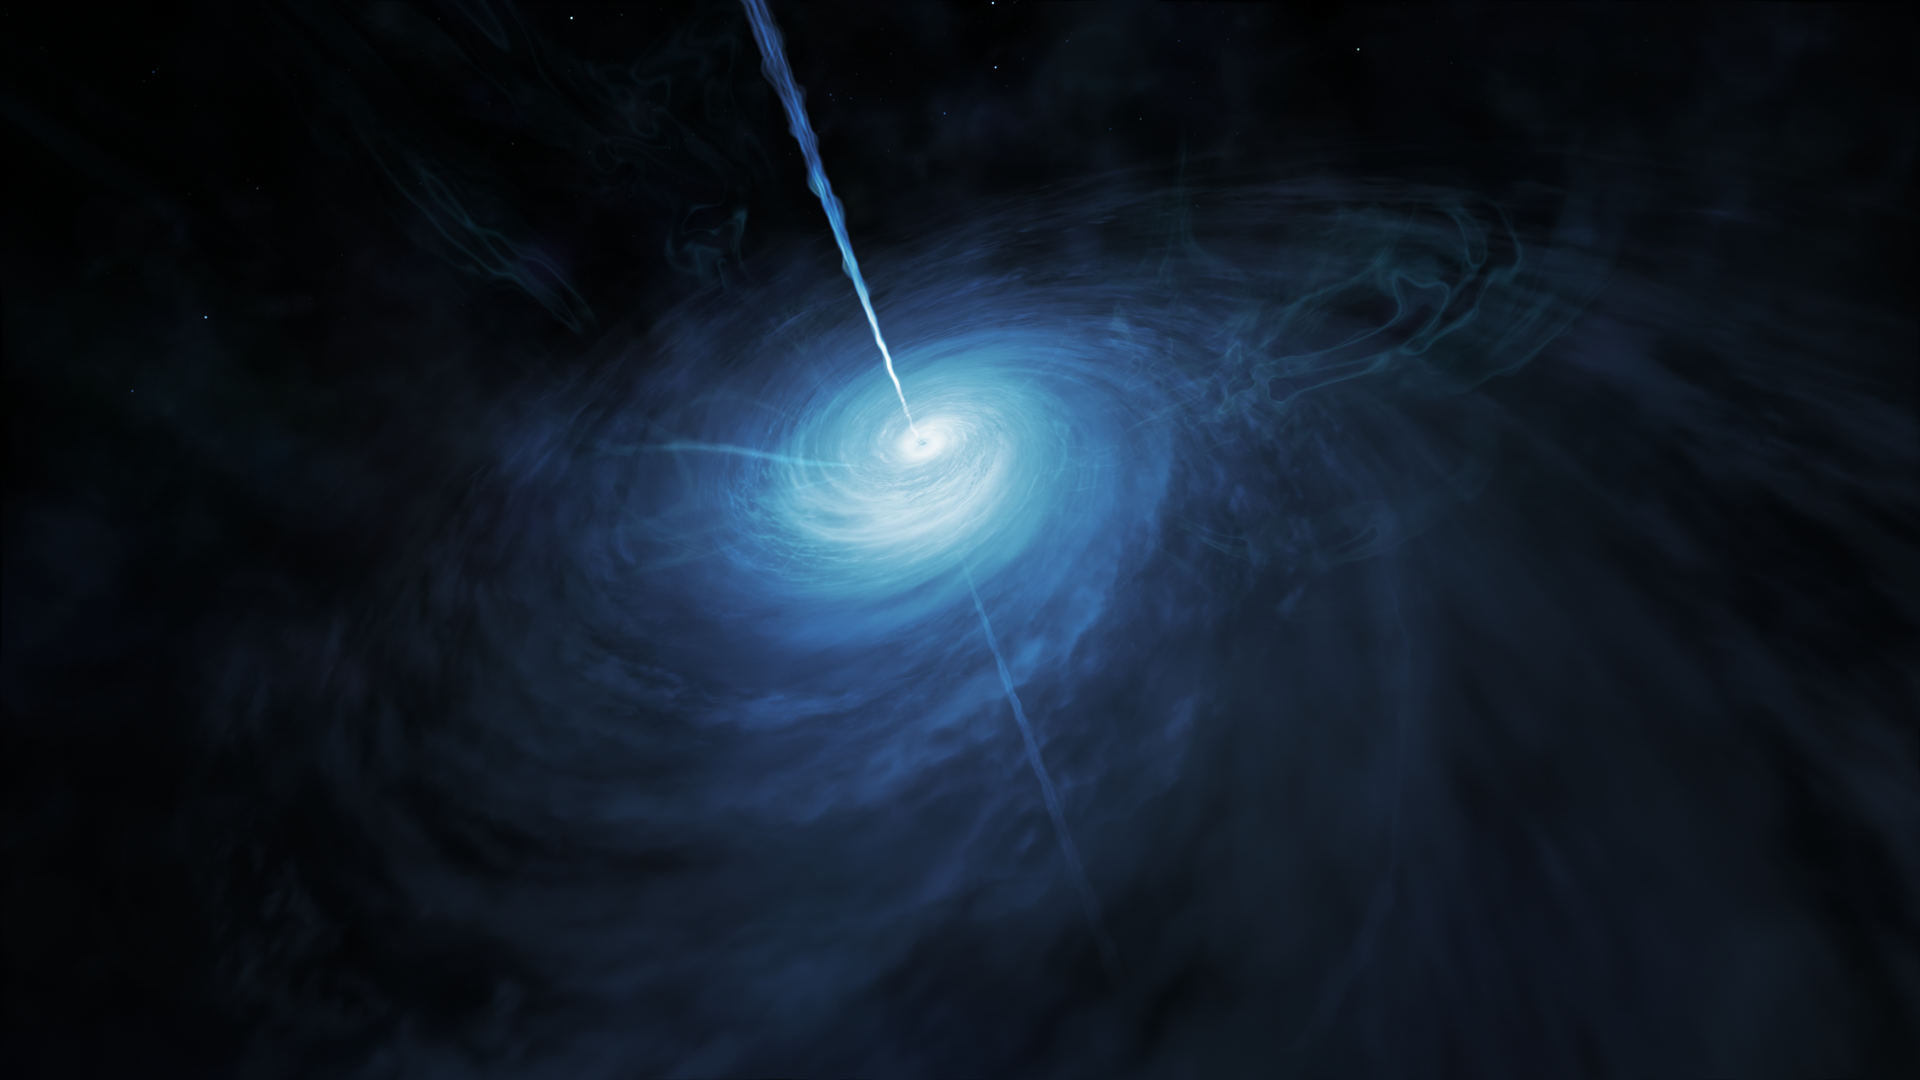

Artist’s impression of distant quasar

This artist’s impression shows how J043947.08+163415.7, a very distant quasar powered by a supermassive black hole, may look close up. This object is by far the brightest quasar yet discovered in the early Universe.

Credit: ESA/Hubble, NASA, M. Kornmesser